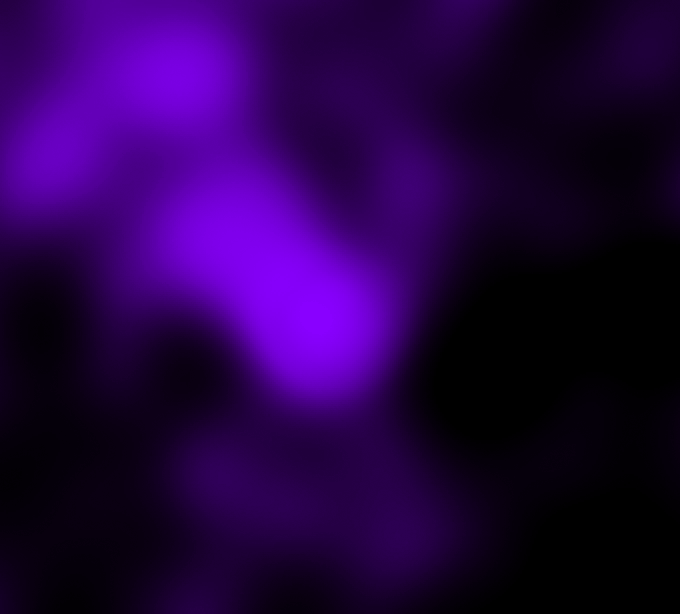

Galaxy C153 in Cluster Abell 2125 in X-ray (Chandra)

Trailing 200,000-light-year-long streamers of seething gas, a galaxy that was once like our Milky Way is being shredded as it plunges at 4.5 million miles per hour through the heart of a distant cluster of galaxies. In this unusually violent collision with ambient cluster gas, the galaxy is stripped down to its skeletal spiral arms as it is eviscerated of fresh hydrogen for making new stars.

Credit: Q. Daniel Wang (U Mass.)